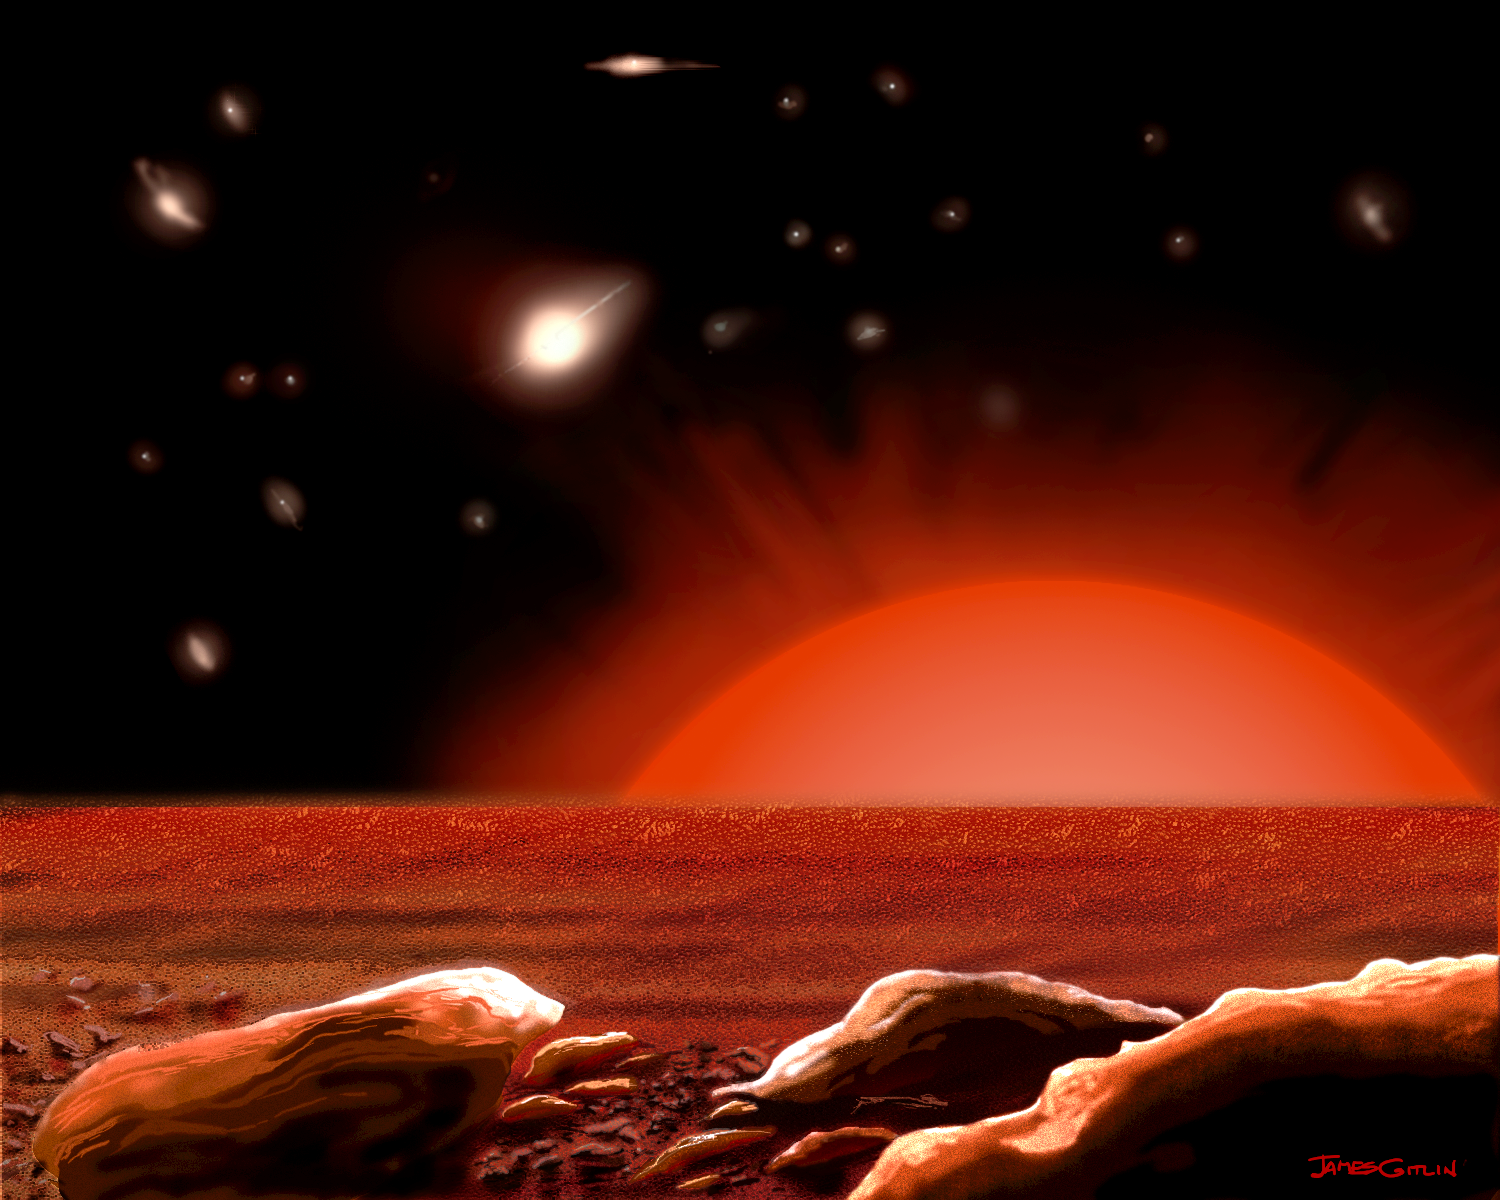

Intergalactic Vista From A Lonely Star (artist's impression)

This is an artist's concept of the view of the nighttime sky from the surface of a hypothetical planet orbiting an 'intergalactic' star in the Virgo cluster of galaxies, based on recent research with the Hubble Space Telescope.

Credit: James Gitlin (STScI)